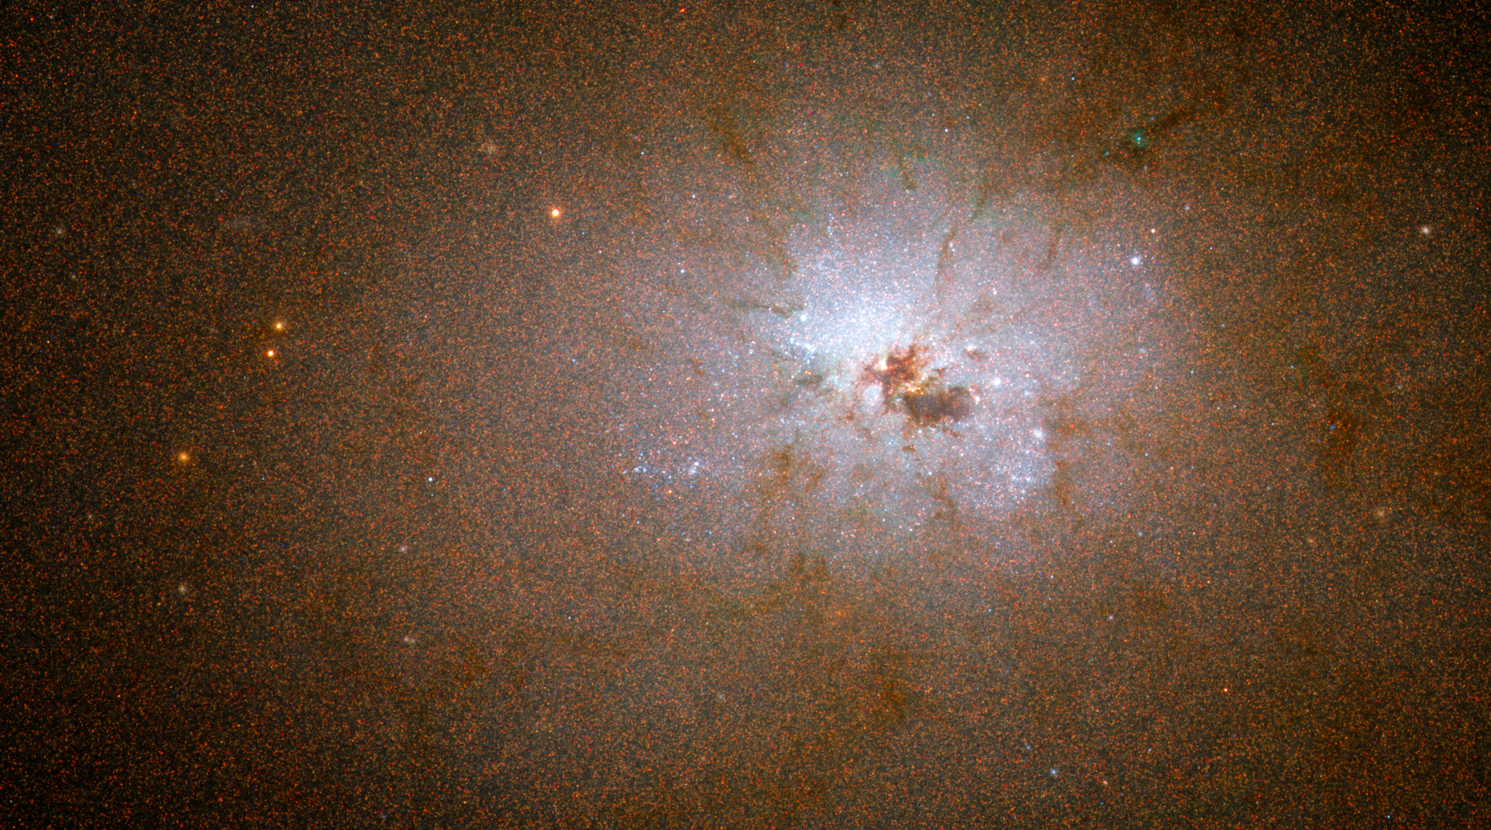

NGC 3077

The dark clumps of material scattered around the bright nucleus of NGC 3077 are pieces of wreckage from the galaxy's interactions with its larger neighbours. NGC 3077 is a member of the M81 group of galaxies and it resides 12.5 million light-years from Earth.

Credit: NASA, ESA, J. Dalcanton and B. Williams (University of Washington)